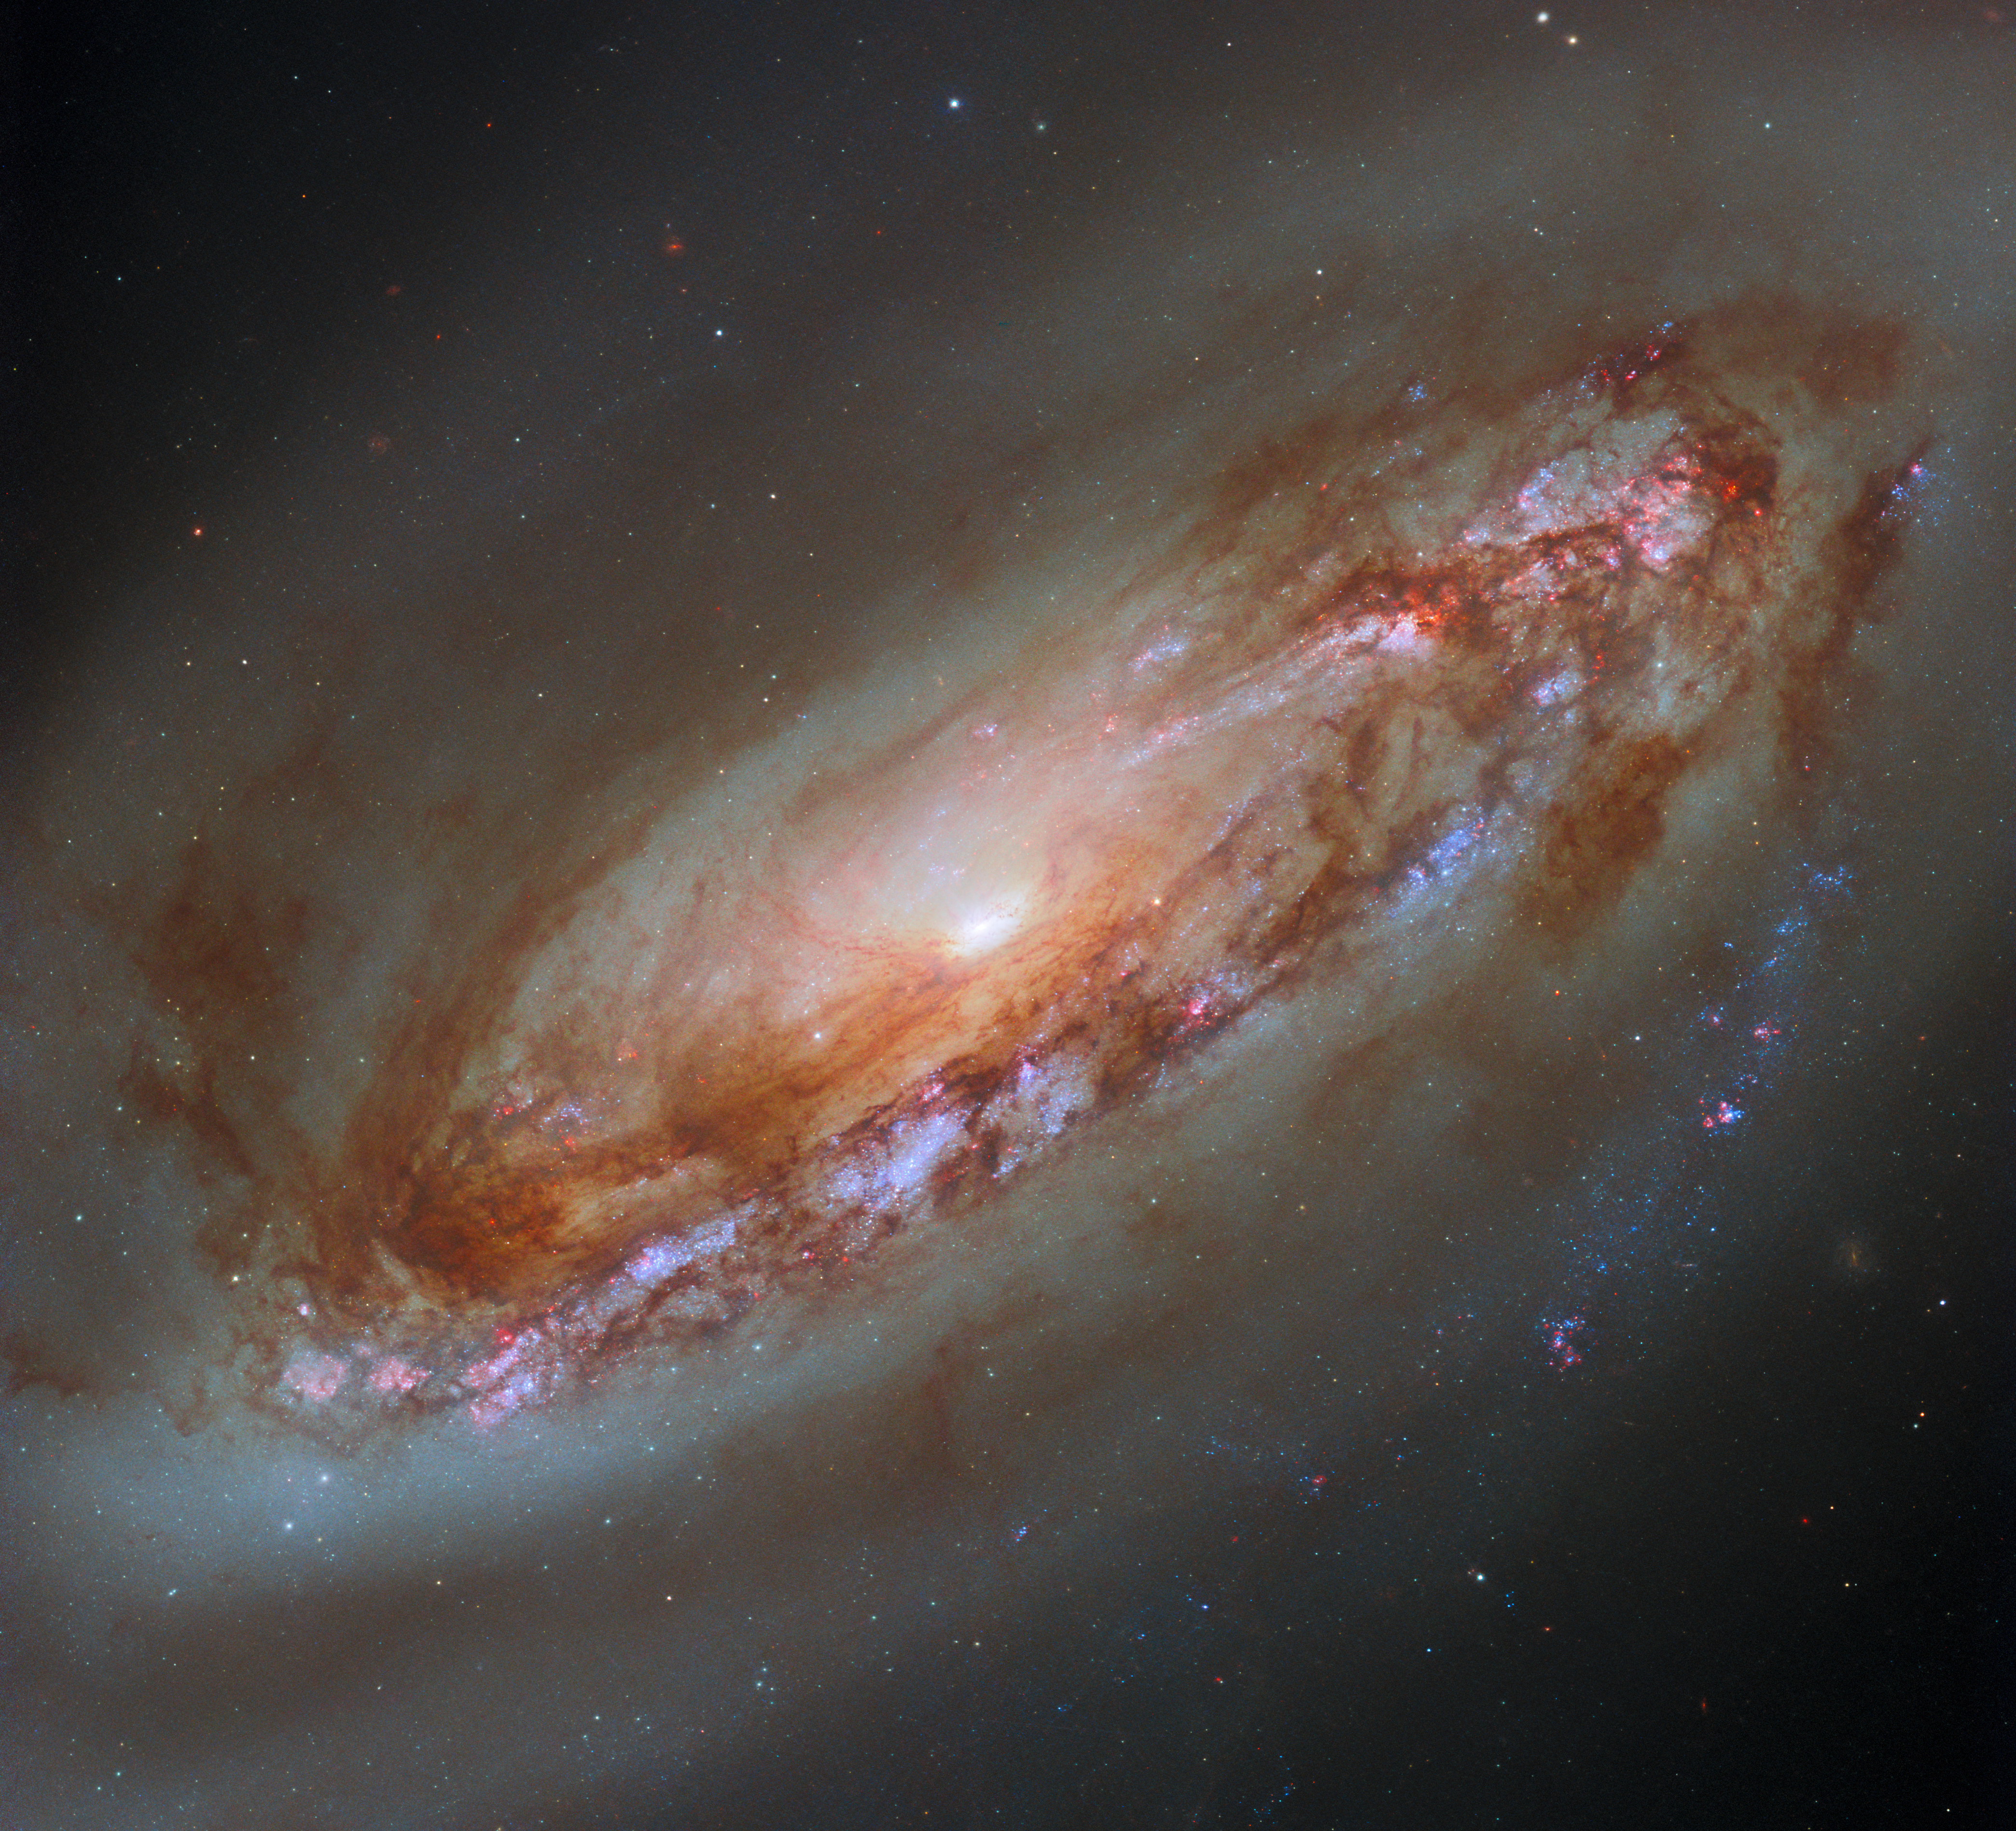

A yet better view

The striking spiral galaxy featured in this week’s Hubble Picture of the Week is Messier 90 (M90, also NGC 4569), located in the constellation Virgo. In 2019, an image of M90 was released using data from the older Wide Field and Planetary Camera 2 — data taken in 1994 soon after the camera’s installation. That image has a distinctive stair-step pattern due to the layout of WFPC2’s sensors. WFPC2 was replaced in 2010 by the Wide Field Camera 3, and Hubble used WFC3 when it turned its aperture to Messier 90 again in 2019 and 2023. The resulting data was processed to create this stunning new image, providing a much fuller view of the galaxy’s dusty disc, its gaseous halo and its bright core.

The inner regions of M90’s disc are sites of star formation, which is highlighted here by red H-alpha light from nebulae, but this is absent in the rest of the galaxy. M90 sits among the galaxies of the relatively nearby Virgo Cluster, and the course of its orbit took it on a path near the cluster’s centre about three hundred million years ago. The density of gas in the inner cluster weighed on M90 like a strong headwind, stripping enormous quantities of gas from the galaxy and creating the diffuse halo that can be seen around it here. This gas is no longer available for M90 to form new stars with, and it will eventually fade as a spiral galaxy as a result.

M90 is located 55 million light-years from Earth, but it’s one of the very few galaxies getting closer to us. Its orbit through the Virgo cluster has accelerated it so much that it’s in the process of escaping the cluster entirely, and by happenstance it’s moving in our direction — other galaxies in the Virgo cluster have been measured at similar speeds, but in the opposite direction. Over the coming billions of years, we will be treated to a yet better view of M90 while it evolves into a lenticular galaxy.

Credit: ESA/Hubble & NASA, D. Thilker, J. Lee and the PHANGS-HST Team